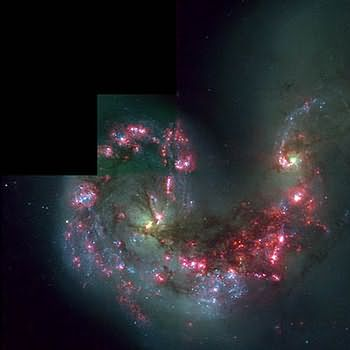

HST/WFPC2 image of colliding galaxies NGC 4038 and NGC 4039

Includes an image made in red light from hydrogen gas.

Credit: Brad Whitmore (STScI)